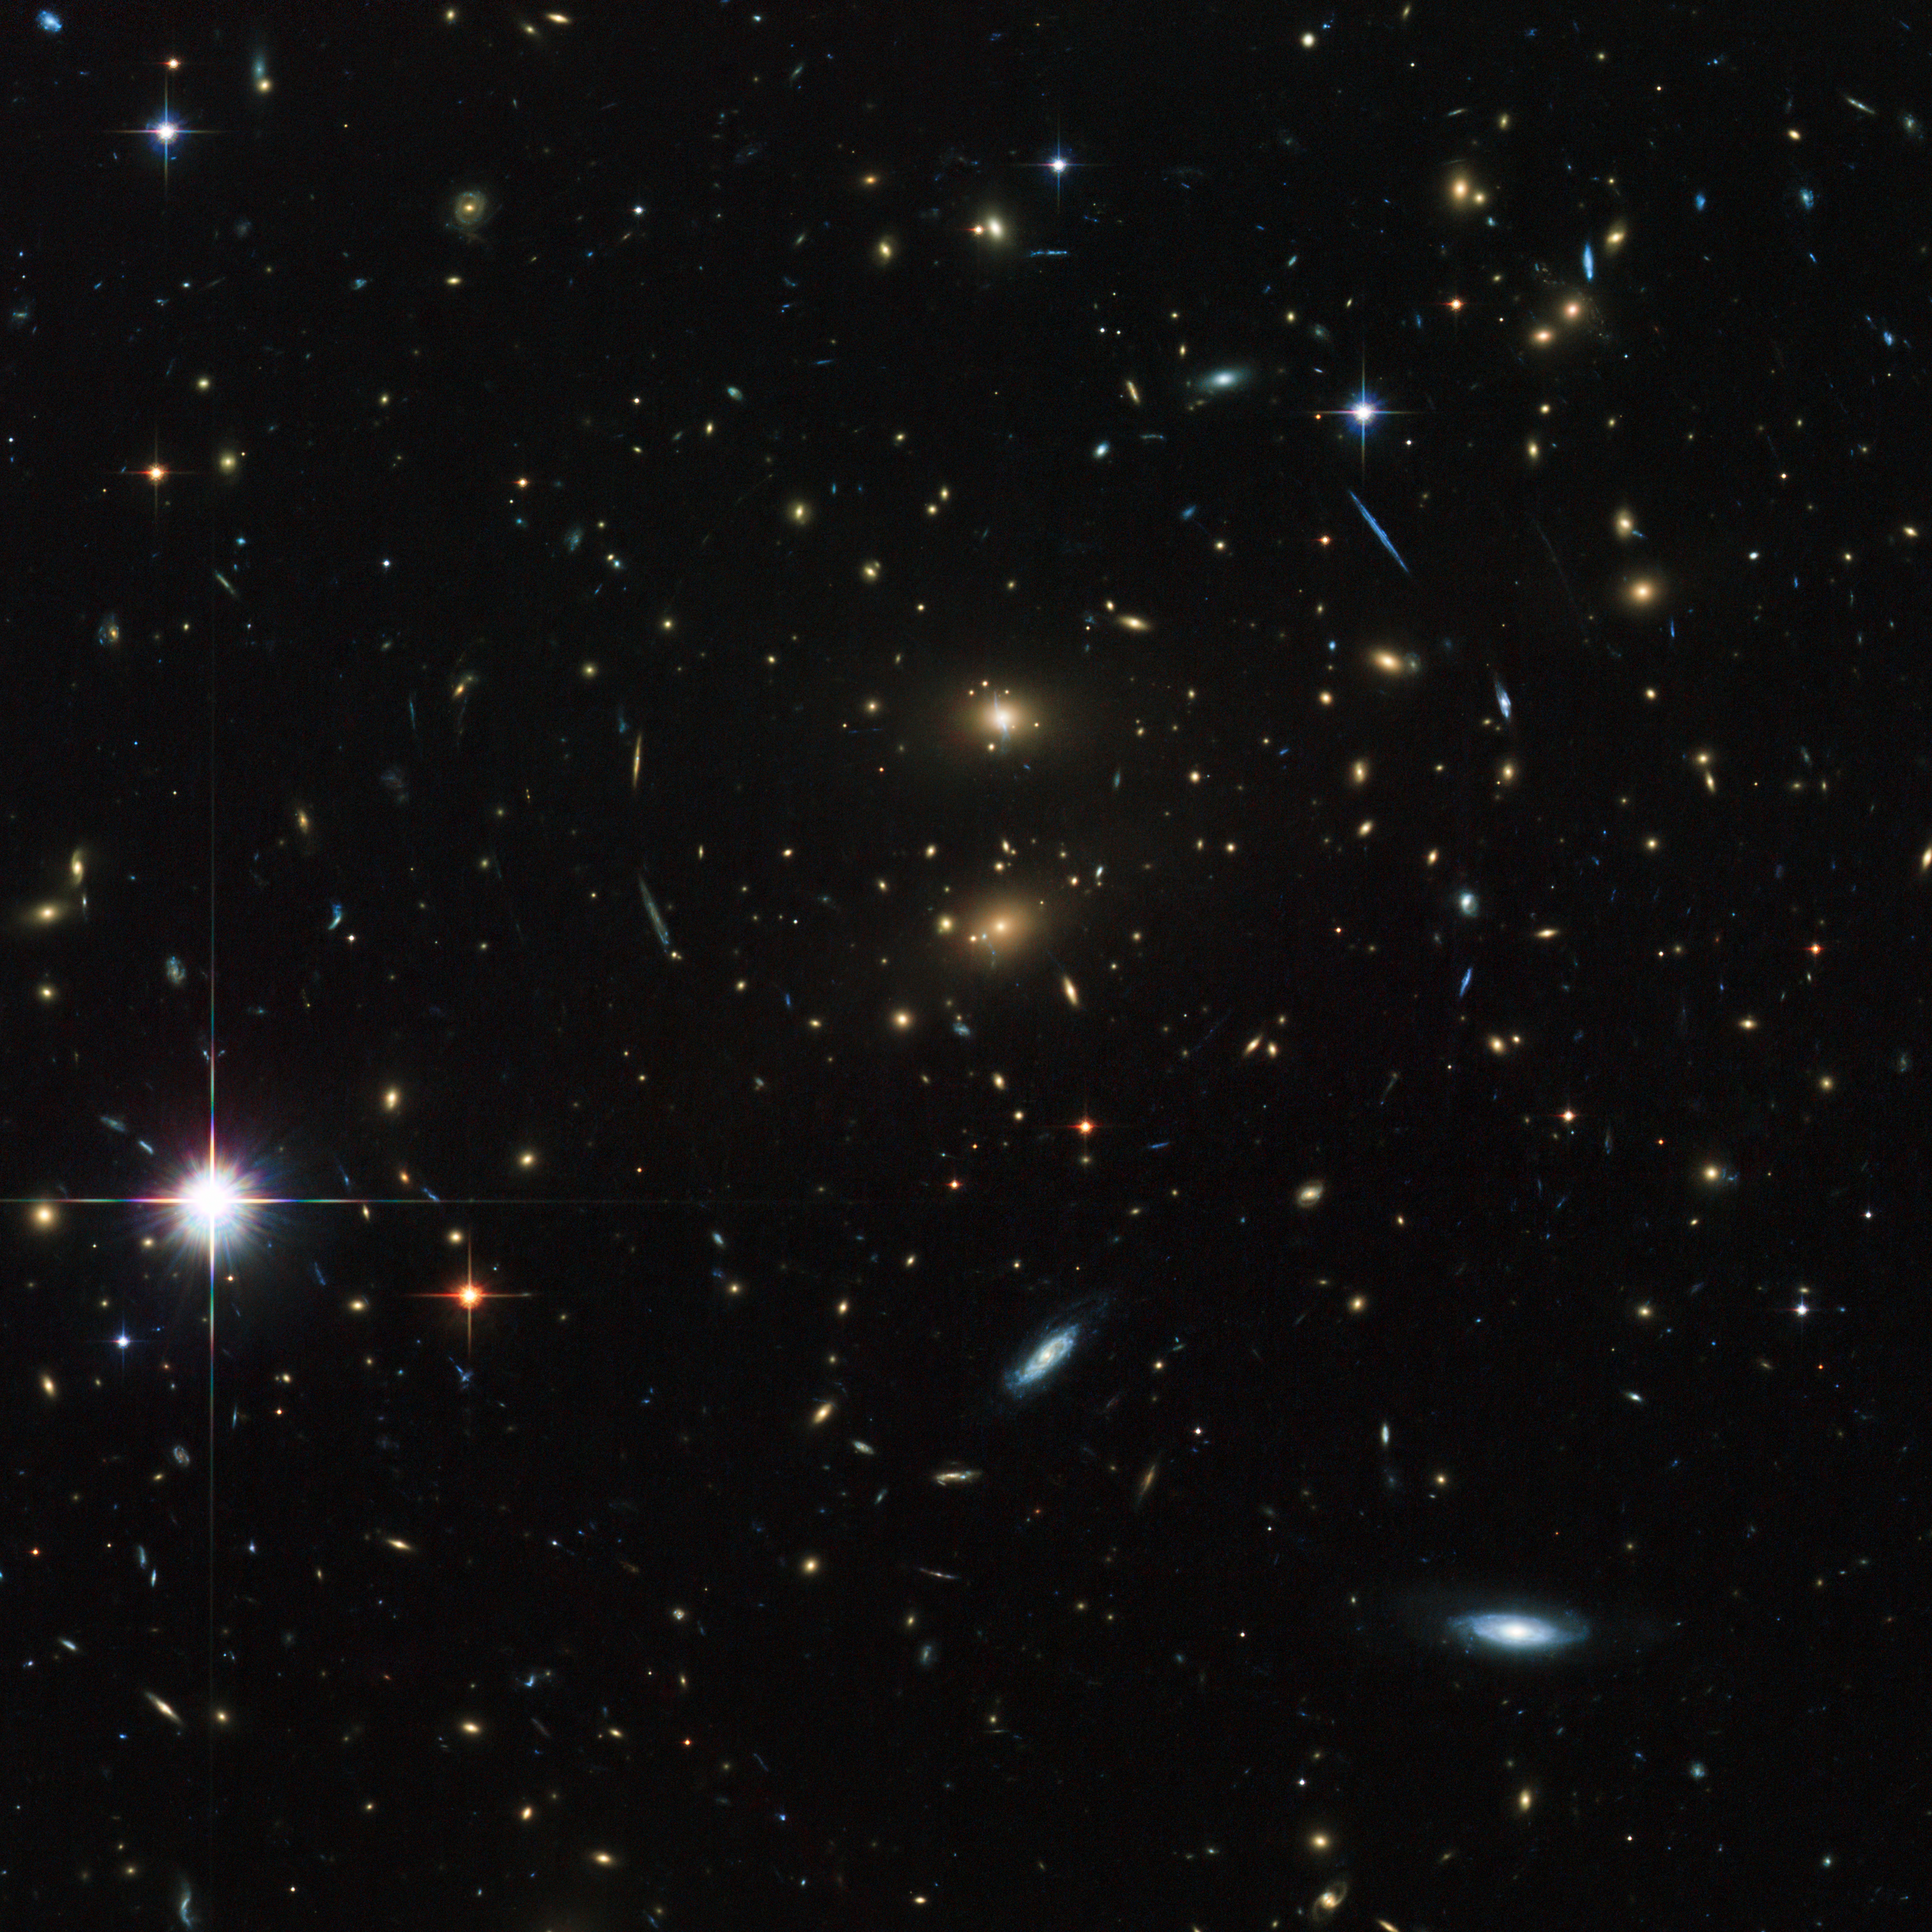

Hubble peers through the looking glass

The NASA/ESA Hubble Space Telescope usually works as a solo artist to capture awe-inspiring images of the distant Universe. For this picture, though, Hubble had a helping hand from the subject of the image, a galaxy cluster called LCDCS-0829, as the huge mass of the galaxies in the cluster acted like a giant magnifying glass. This strange effect is called gravitational lensing.

The object was discovered during the Las Campanas Distant Clusters Survey, which explains the cluster's unusual name. This survey was carried out in March 1995 using a 1-metre telescope at the Las Campanas Observatory in Chile. More than one thousand clusters of galaxies, most of them previously unknown, were found in a dedicated survey of a long, but narrow, section of the southern sky.

The bizarre phenomenon of gravitational lensing is a consequence of Albert Einstein’s general theory of relativity, which says that the huge mass of the galaxy cluster bends the fabric of the Universe, and the light from one of the distant galaxies will then travel along this bend in the fabric. In addition to making some objects appear bigger and brighter, gravitational lensing can produce multiple images of distant galaxies and stretch them into strange arcs. Many such arcs can be seen in this image.

This deep image of the cluster was created from a total of 36 exposures taken using the Wide Field Channel of Hubble’s Advanced Camera for Surveys. Images through a blue filter (F475W) were coloured blue, images through a near-infrared filter (F814W) were coloured green and images through a filter that passes infrared light of even longer wavelengths (F850LP) were coloured red. The total exposure times were 5280 s per filter and the field of view is about 2.8 arcminutes across.

Credit: ESA/Hubble & NASA